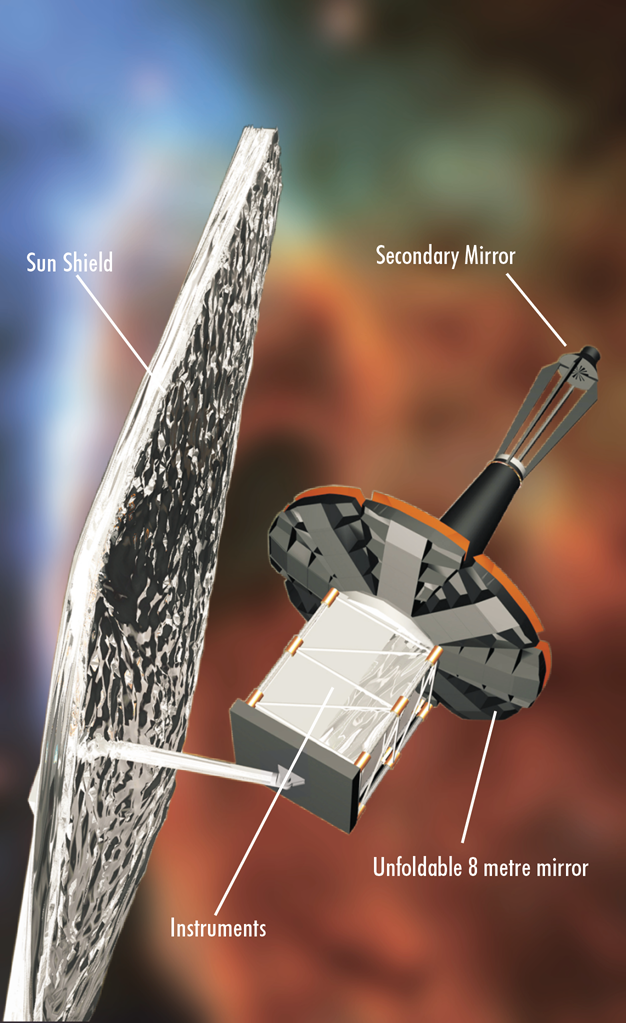

The James Webb Space Telescope (artist's impression)

The main components of the James Webb Space Telescope.

Credit: ESA